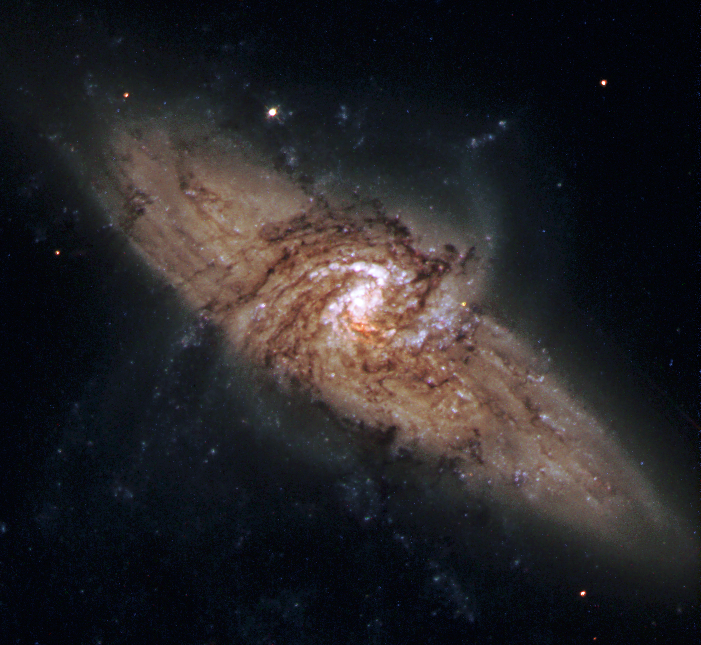

Galactic silhouettes

Through an extraordinary chance alignment, the Hubble telescope has captured a view of a face-on spiral galaxy lying precisely in front of another larger spiral. The unique pair is called NGC 3314. This line-up provides astronomers with the rare chance to see the dark material within the foreground galaxy, seen only because it is silhouetted against the light from the object behind it. NGC 3314 lies about 140 million light-years from Earth in the direction of the southern hemisphere constellation Hydra.

This picture is one of many produced by the Hubble Heritage Program, created 1-1/2 years ago to publicly release some of the best celestial views taken by the telescope's visible-light camera. Now, the International Center of Photography in New York City has rewarded the program for its work with the annual Infinity Award for Applied Photography.

Credit: NASA/ESA and The Hubble Heritage Team (STScI/AURA)